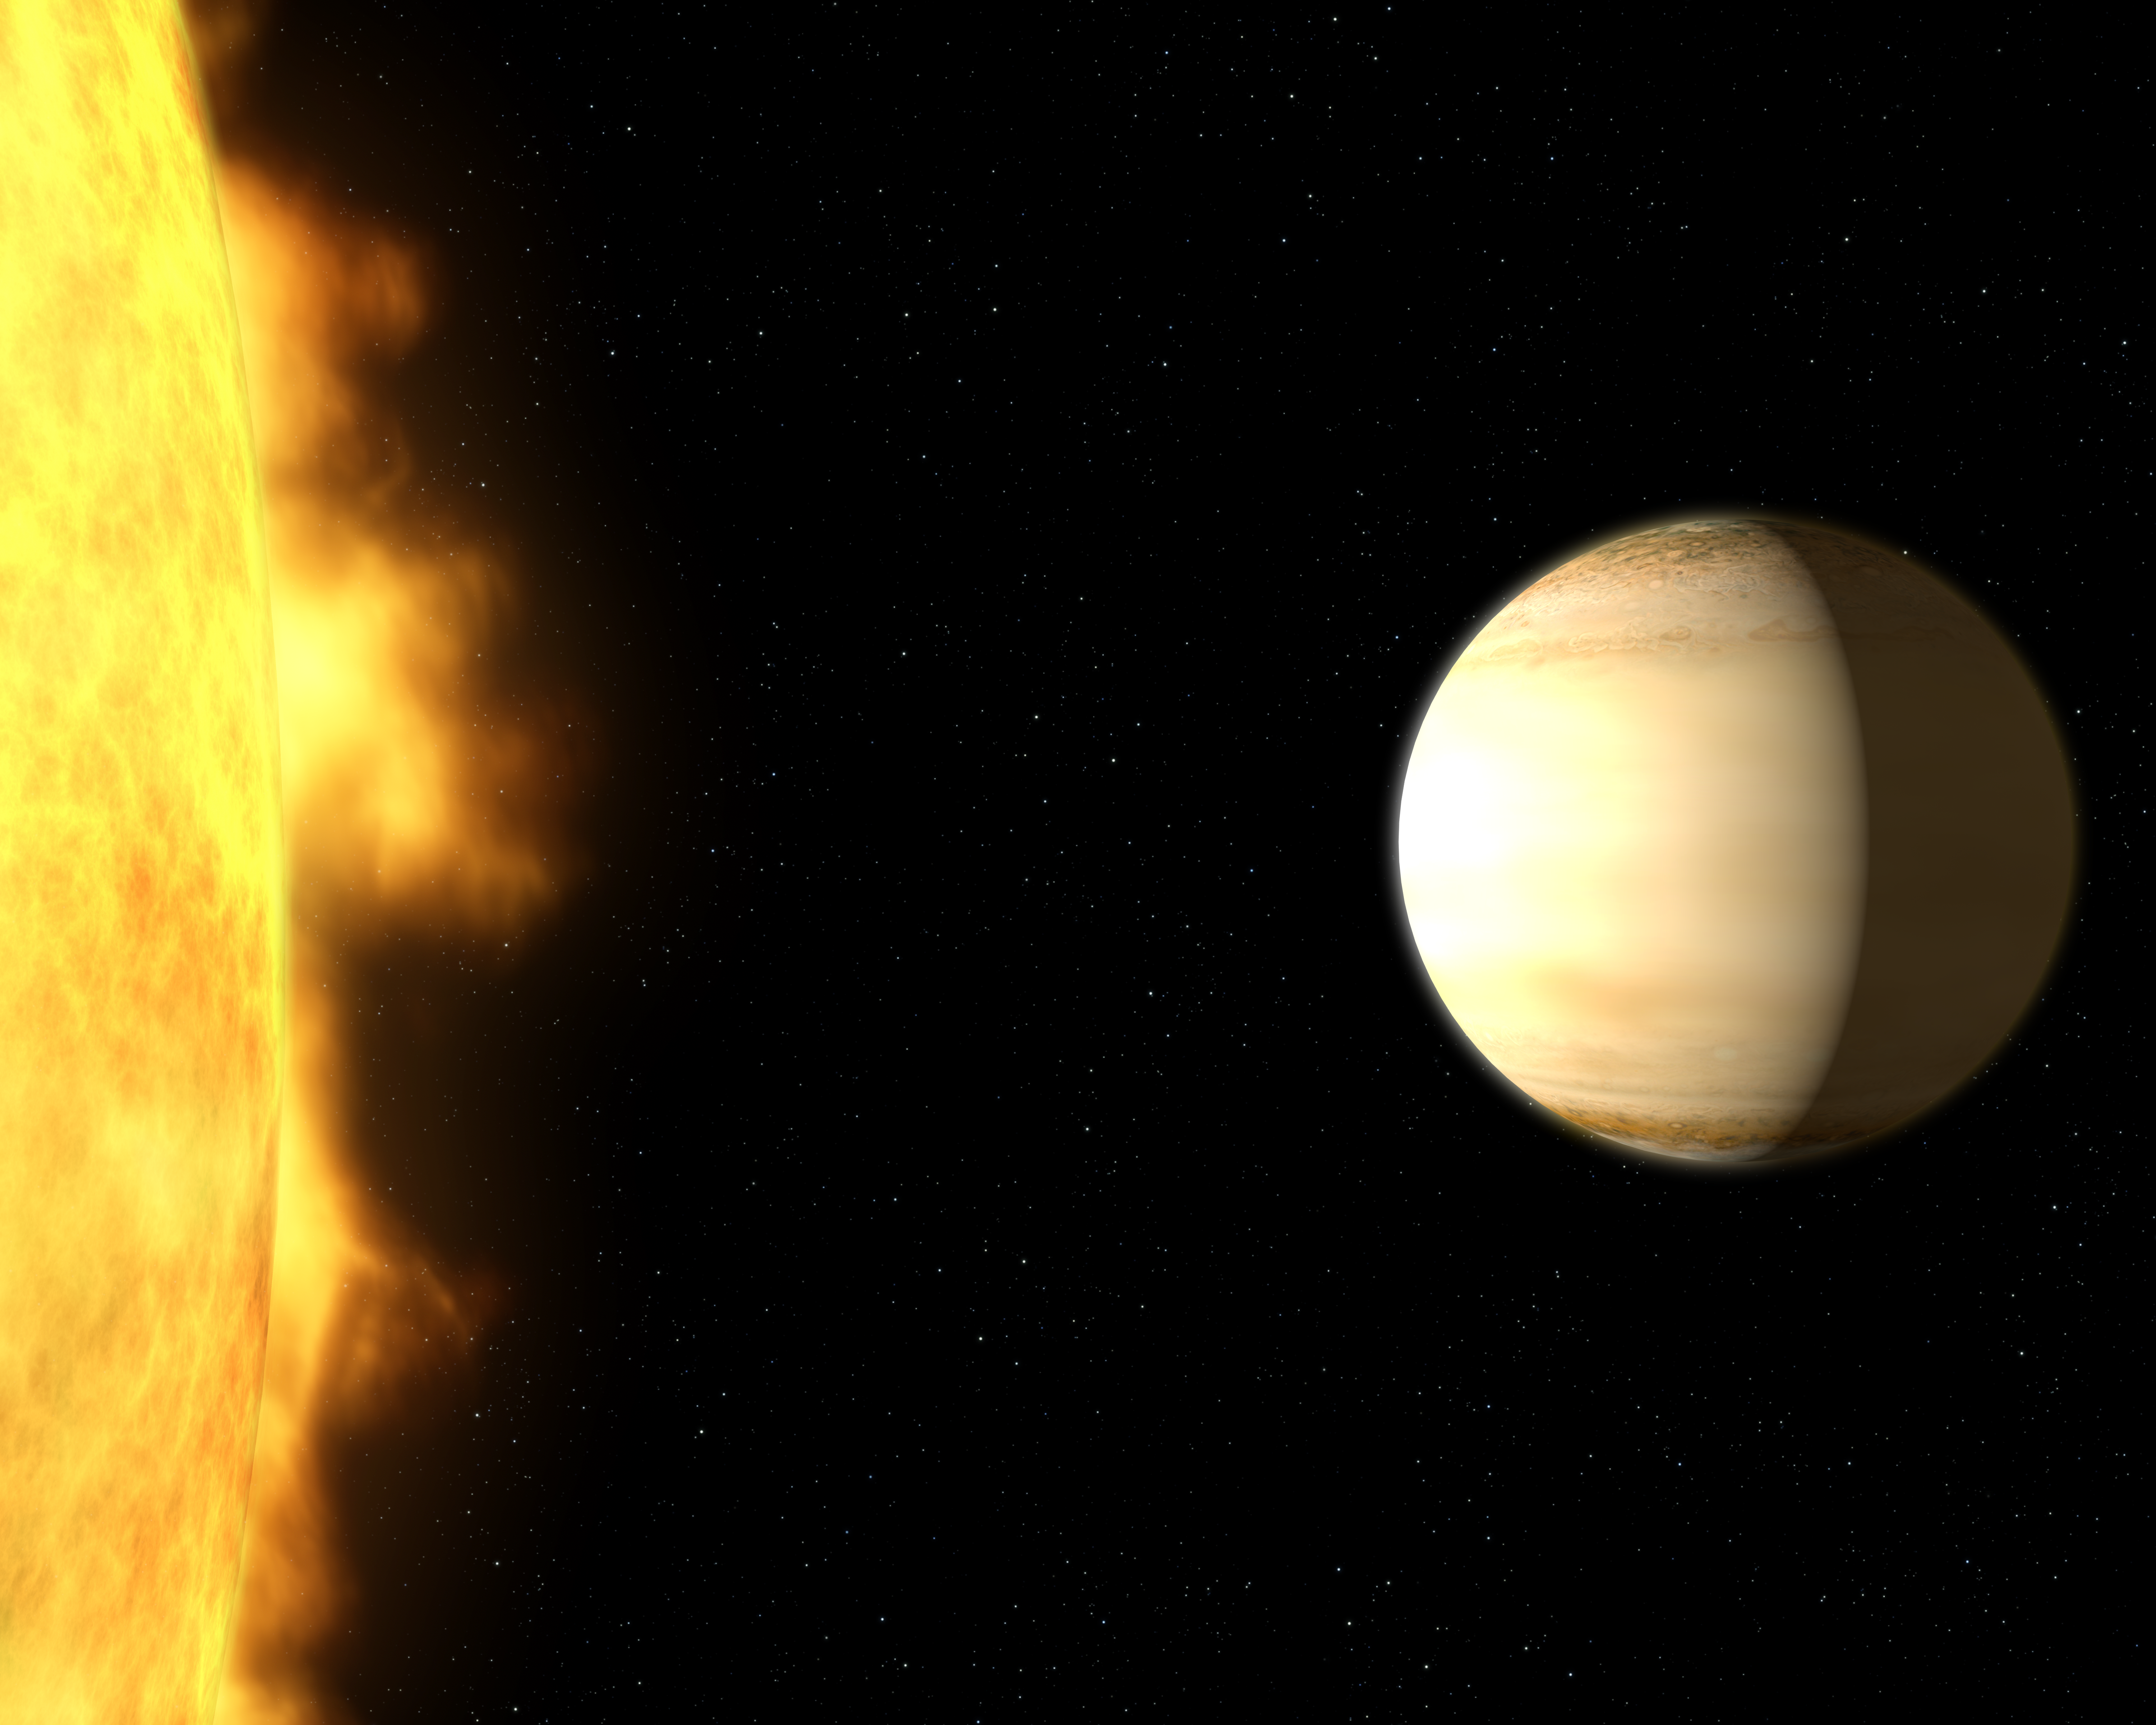

Wasp-39b and its parent star (artist’s impression)

A team of British and American astronomers used data from several telescopes on the ground and in space — among them the NASA/ESA Hubble Space Telescope — to study the atmosphere of the hot, bloated, Saturn-mass exoplanet WASP-39b, about 700 light-years from Earth. The analysis of the spectrum showed a large amount of water in the exoplanet’s atmosphere — three times more than in Saturn’s atmosphere.

WASP-39b is eight times closer to its parent star, WASP-39, than Mercury is to the Sun and it takes only four days to complete an orbit.

Credit: NASA, ESA, and G. Bacon (STScI)